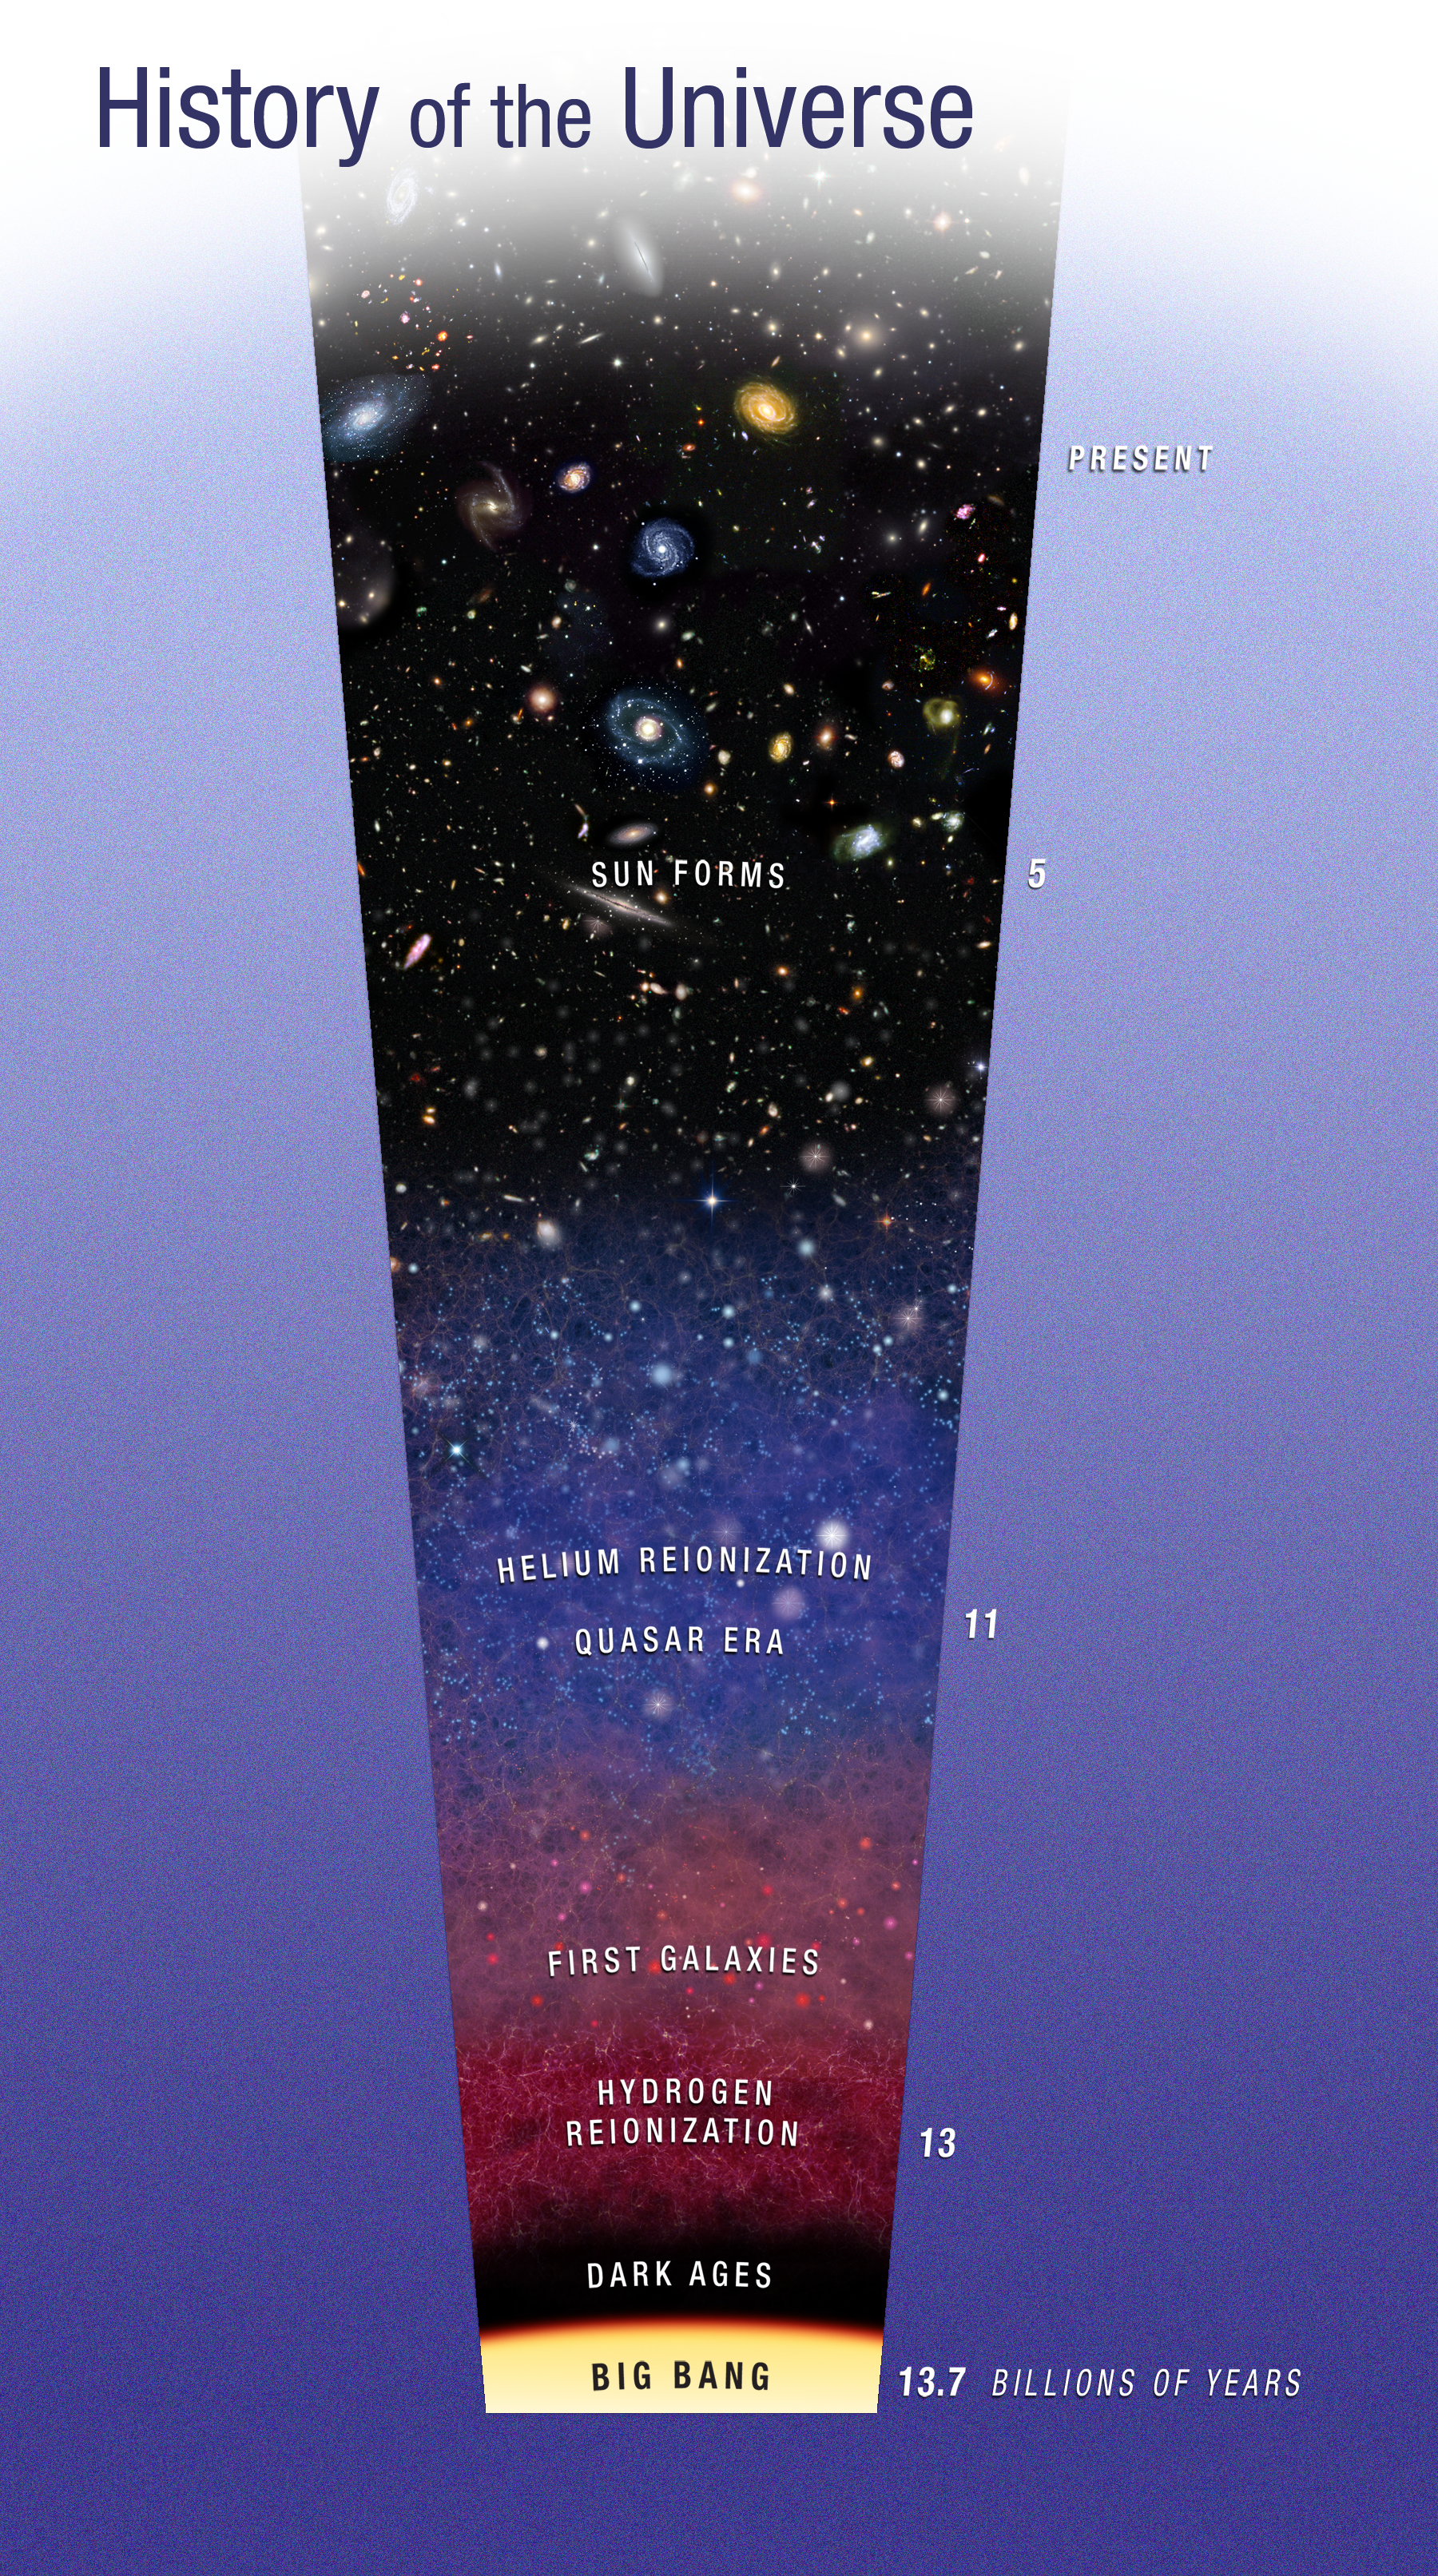

History of the Universe

This diagram traces the evolution of the Universe from the big bang to the present. Two watershed epochs are shown. Not long after the big bang, light from the first stars burned off a fog of cold hydrogen in a process called reionisation. At a later epoch quasars, the black-hole-powered cores of active galaxies, pumped out enough ultraviolet light to reionise the primordial helium.

Credit: NASA, ESA, and A. Feild (STScI)